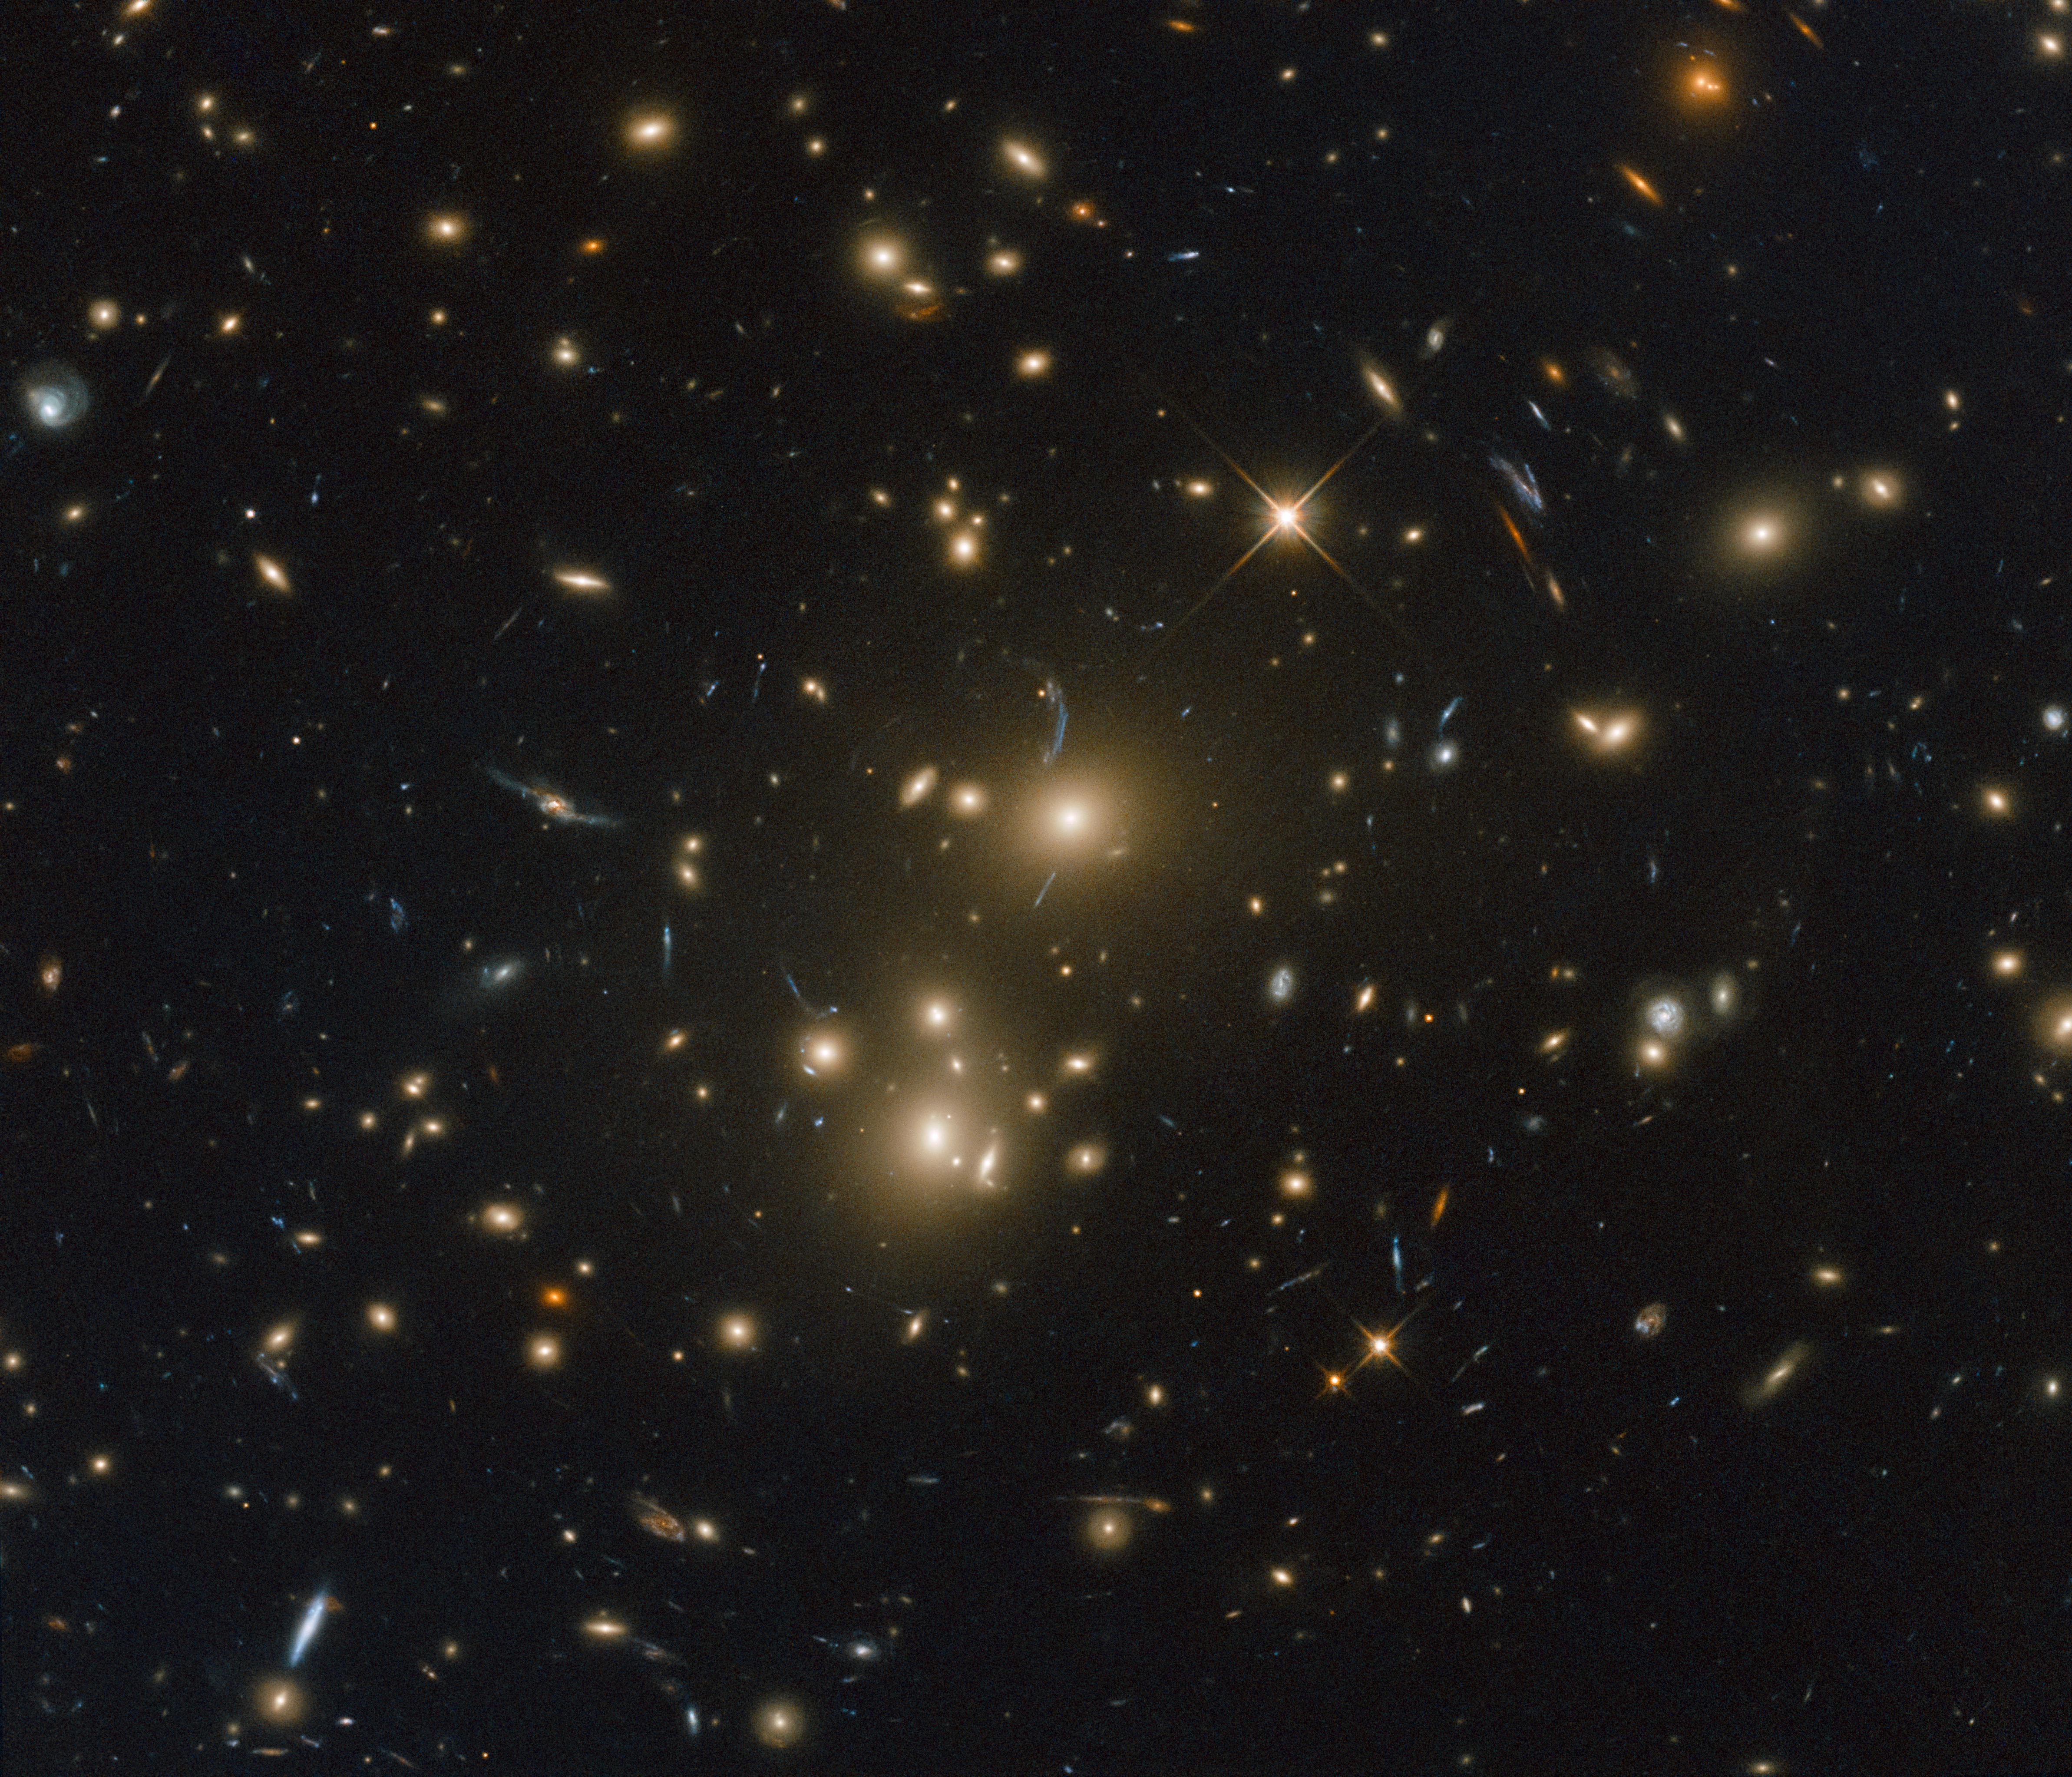

Strings of homeless stars

This sparkling Picture of the Week features a massive galaxy cluster named RXC J0232.2-4420. This image was taken by Hubble’s Advanced Camera for Surveys and Wide-Field Camera 3 as part of an observing programme called RELICS (Reionization Lensing Cluster Survey). RELICS imaged 41 massive galaxy clusters with the aim of finding the brightest distant galaxies for the forthcoming NASA/ESA/CSA James Webb Space Telescope (JWST) to study.

The enormous gravitational influence of such clusters distorts the space around them in such a way that they can be used as giant cosmic lenses that magnify distant background galaxies. Studying some of the earliest galaxies in the Universe will tell us more about our cosmic origins.

RXC J0232.2-4420 also featured in a study that focused on galaxy clusters that are especially luminous sources of X-rays . The study searched for diffuse light around the brightest galaxies in the clusters, among the most massive galaxies in the Universe. This diffuse light comes from intergalactic stars strung out between the constituent galaxies of the cluster and the aim of the study was to explore various theories for the origins of these stars. One theory is that they may have been stripped from their host galaxies during mergers and interactions.

Credit: ESA/Hubble & NASA, RELICS